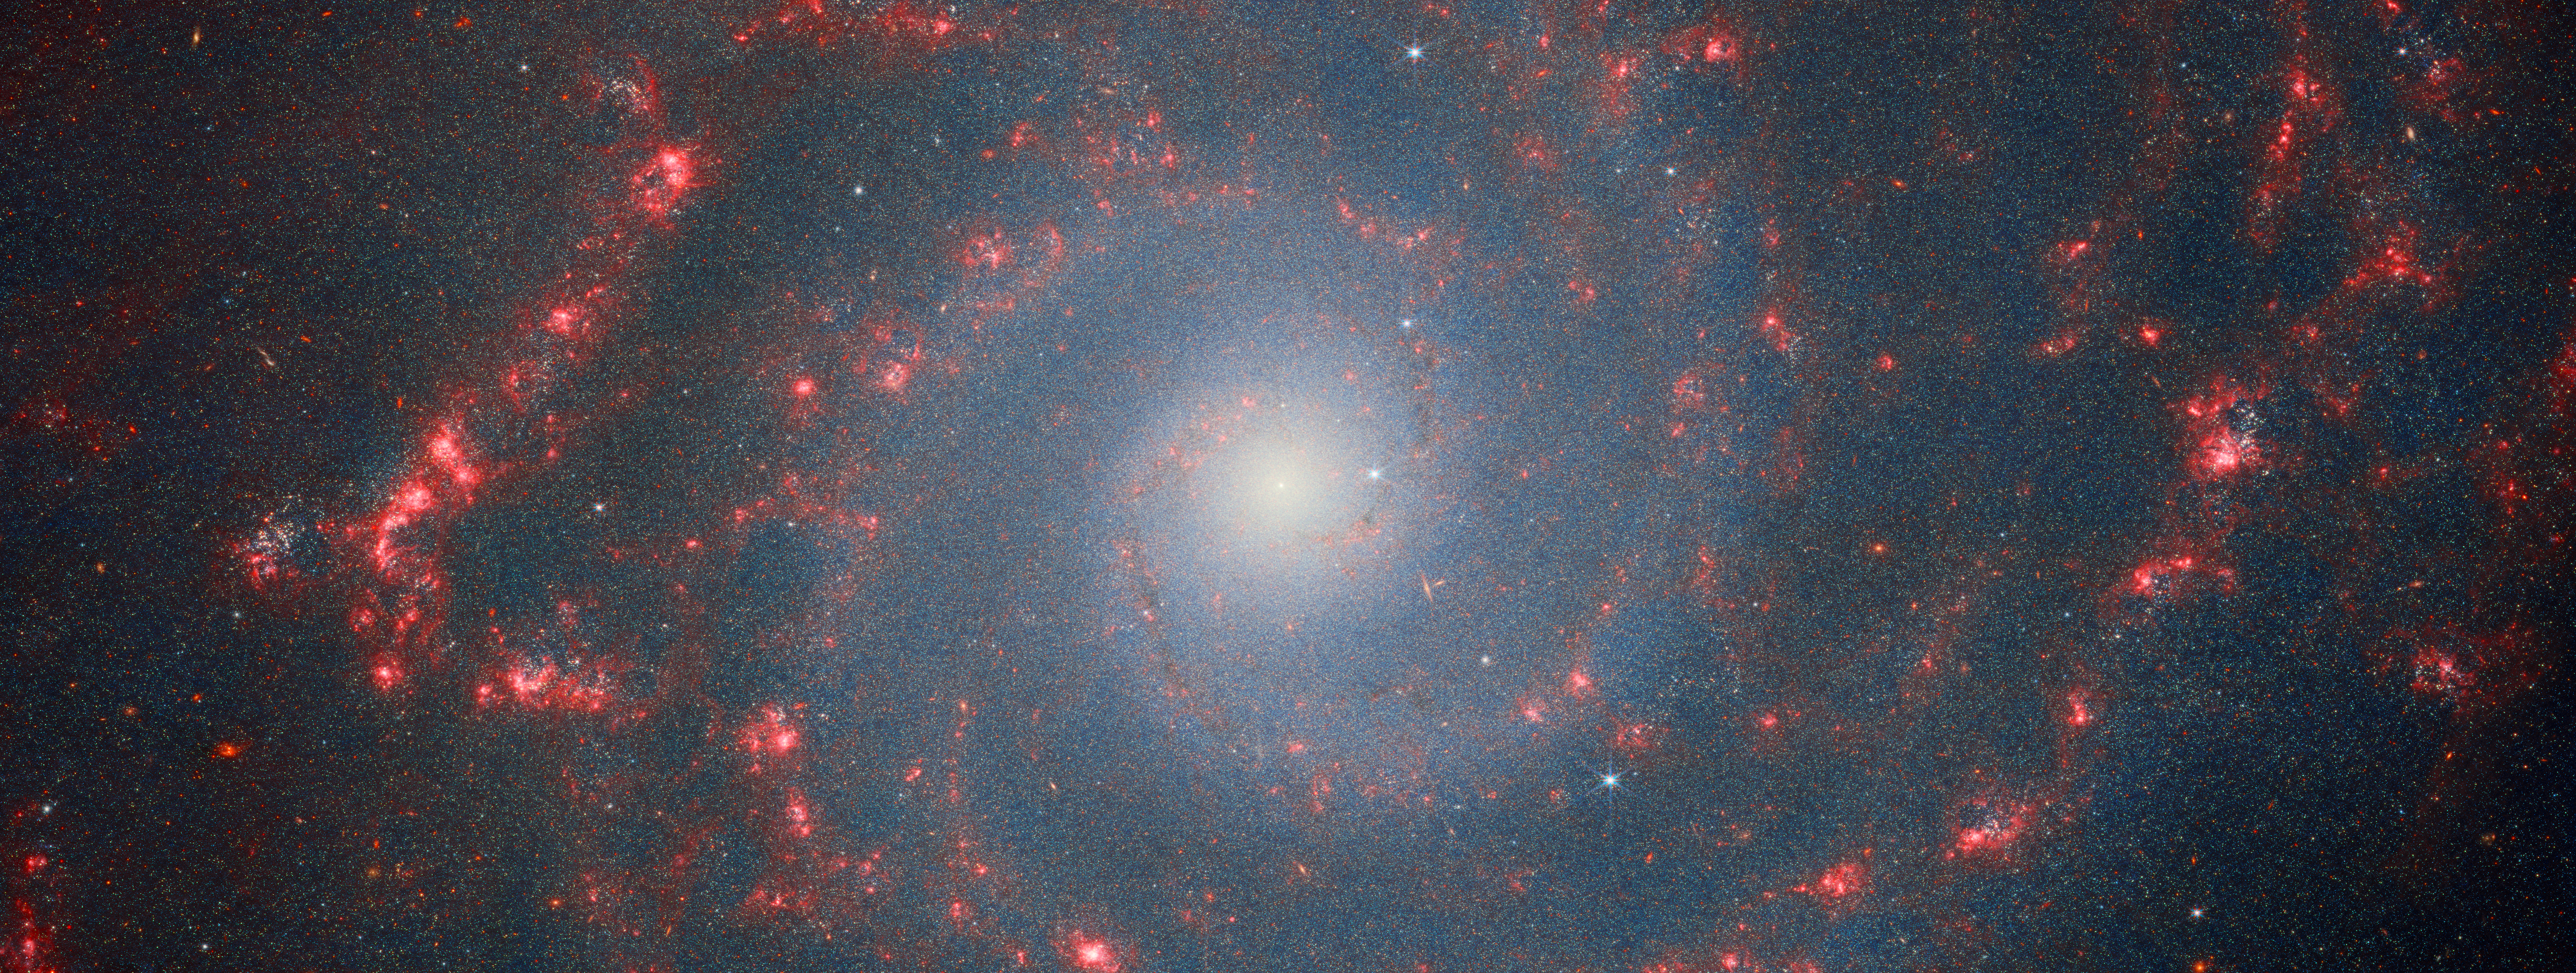

Catching the edge of the Phantom Galaxy (NIRCam image)

In August 2022, to mark the launch of the Picture of the Month series, ESA/Webb published a stunning image of the Phantom Galaxy (also known as M74 and NGC 628). Now, this series is revisiting the target to feature new data of this iconic spiral galaxy.

M74 resides around 32 million light-years away from Earth in the constellation Pisces, and lies almost face-on to Earth. This, coupled with its well-defined spiral arms, makes it a favourite target for astronomers studying the origin and structure of galactic spirals.

This image features data from Webb’s NIRCam (Near-InfraRed Camera). Observations in the infrared reveal the galaxy’s creeping tendrils of gas, dust and stars. In this image, the dark red features trace the filamentary warm dust, while red regions indicate gas ionised by the recently formed star clusters. Stellar feedback has a dramatic effect on the medium within the galaxy and creates a complex network of bright knots as well as cavernous black bubbles. M74 is a particular class of spiral galaxy known as a ‘grand design spiral’, meaning that its spiral arms are prominent and well-defined, unlike the patchy and ragged structure seen in some spiral galaxies.

M74 was observed by Webb as part of a series of observations collectively entitled Feedback in Emerging extrAgalactic Star clusTers, or FEAST (PI: A. Adamo). Many other targets of the FEAST programme, including NGC 4449, M51, and M83, were the subjects of previous ESA/Webb Picture of the Month images in 2023 and 2024. The FEAST observations were designed to shed light on the interplay between stellar feedback and star formation in environments outside the Milky Way galaxy. Stellar feedback is the term used to describe the outpouring of energy from stars into the environments which form them, and is a process that contributes significantly to determining the rates at which stars form. Understanding stellar feedback is vital for building accurate universal models of star formation.

The new Webb data obtained by the FEAST team has allowed scientists to look at the stellar nurseries in galaxies that are many light years away. Astronomers are learning how other galaxies are forming stars and how stars actively participate to model the galaxy interstellar medium. They have found that newly born stars slowly carve they gas and dust nurseries modifying the morphological appearance and essentially destructing them, as Webb has shown that this evolution is connected with star clusters. Furthermore, the team has concluded from their studies that the spiral arms captured by the extended coverage of the FEAST programme are the places where stars are forming more actively in the galaxy. The brighter and larger complexes of stellar nurseries are in the spiral arms fully captured by the new Webb data. The telescope is now revealing the map of hydrogen emission lines in the near-infrared. These lines are less affected than the dusts and reveals the places where new massive stars have just formed.

Credit: ESA/Webb, NASA & CSA, A. Adamo (Stockholm University) and the FEAST JWST team